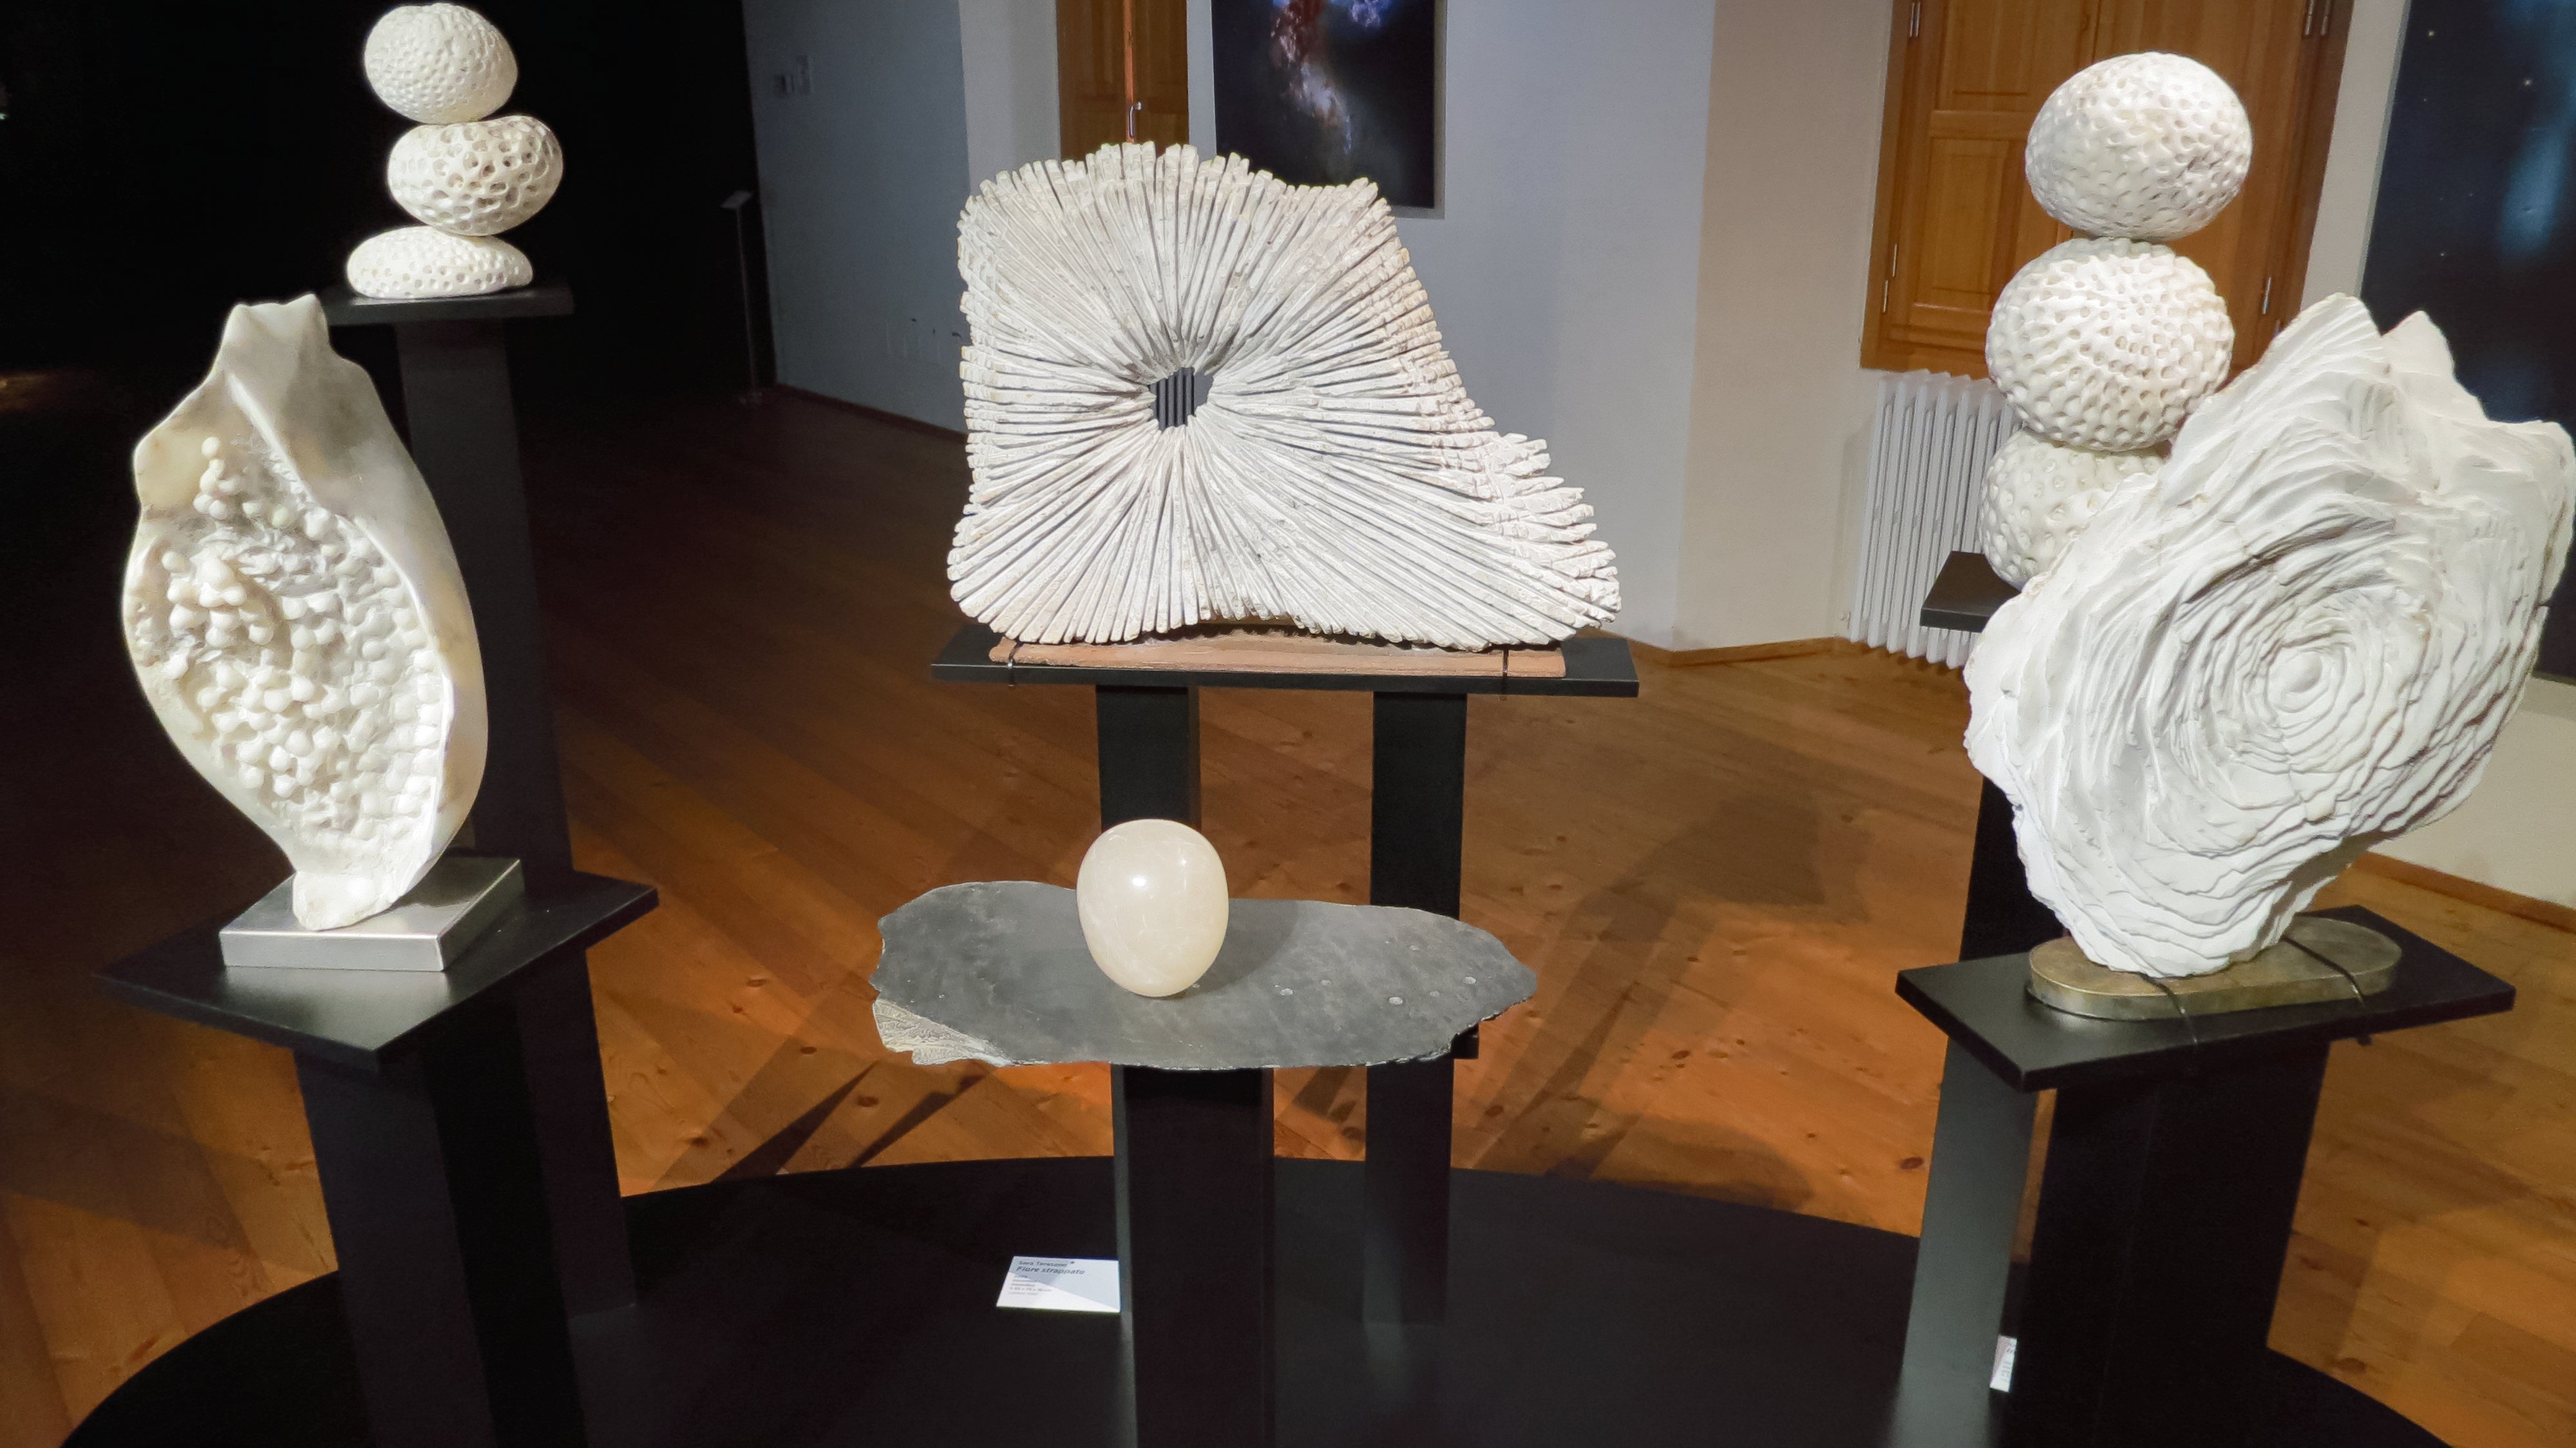

Sculptures of Our Place in Space in Chiavenna

Interactive galaxies, like the Antennae Galaxies and the rose-shaped Arp 273 acted as inspiration for these alabaster sculptures made by the artist Sara Teresano. They freeze the swirling motions of galaxies in a super-hard material, with myriad stars hidden in the warping structure. These sculptures are part of the Hubble travelling exhibition Our Place in Space.

Credit: ESA/Hubble, M. Jäger